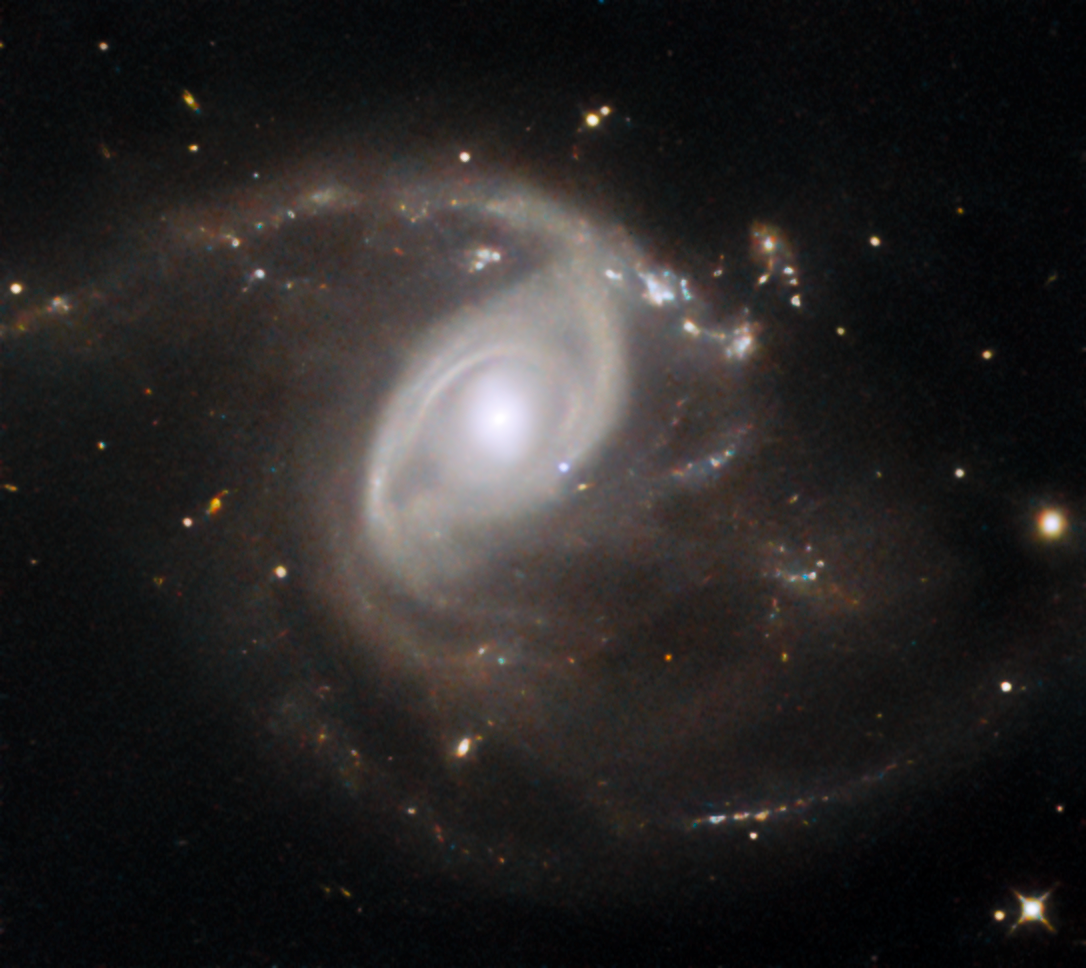

Pale blue (supernova) dot

This NASA/ESA Hubble Space Telescope Picture of the Week features the galaxy LEDA 22057, which is located about 650 million light-years away in the constellation Gemini. Like the subject of last week’s Picture of the Week, LEDA 22057 is the site of a supernova explosion. This particular supernova, named SN 2024PI, was discovered by an automated survey in January 2024. The survey covers the entire northern half of the night sky every two days and has catalogued more than 10 000 supernovae.

The supernova is visible in this image: located just down and to the right of the galactic nucleus, the pale blue dot of SN 2024PI stands out against the galaxy’s ghostly spiral arms. This image was taken about a month and a half after the supernova was discovered, so the supernova is seen here many times fainter than its maximum brilliance.

SN 2024PI is classified as a Type Ia supernova. This type of supernova requires a remarkable object called a white dwarf, the crystallised core of a star with a mass less than about eight times the mass of the Sun. When a star of this size uses up the supply of hydrogen in its core, it balloons into a red giant, becoming cool, puffy and luminous. Over time, pulsations and stellar winds cause the star to shed its outer layers, leaving behind a white dwarf and a colourful planetary nebula. White dwarfs can have surface temperatures higher than 100 000 degrees and are extremely dense, packing roughly the mass of the Sun into a sphere the size of Earth.

While nearly all of the stars in the Milky Way will one day evolve into white dwarfs — this is the fate that awaits the Sun some five billion years in the future — not all of them will explode as Type Ia supernovae. For that to happen, the white dwarf must be a member of a binary star system. When a white dwarf syphons material from a stellar partner, the white dwarf can become too massive to support itself. The resulting burst of runaway nuclear fusion destroys the white dwarf in a supernova explosion that can be seen many galaxies away.

Credit: ESA/Hubble & NASA, R. J. Foley (UC Santa Cruz)